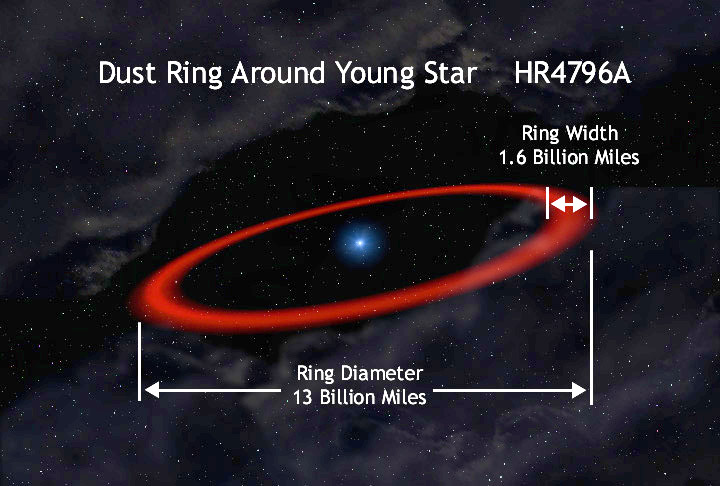

Orbit of HR 4796A

An artist's concept of the star HR 4796A and its surrounding ring, illustrating the size of the ring.

Credit: Greg Bacon, Space Telescope Science Institute